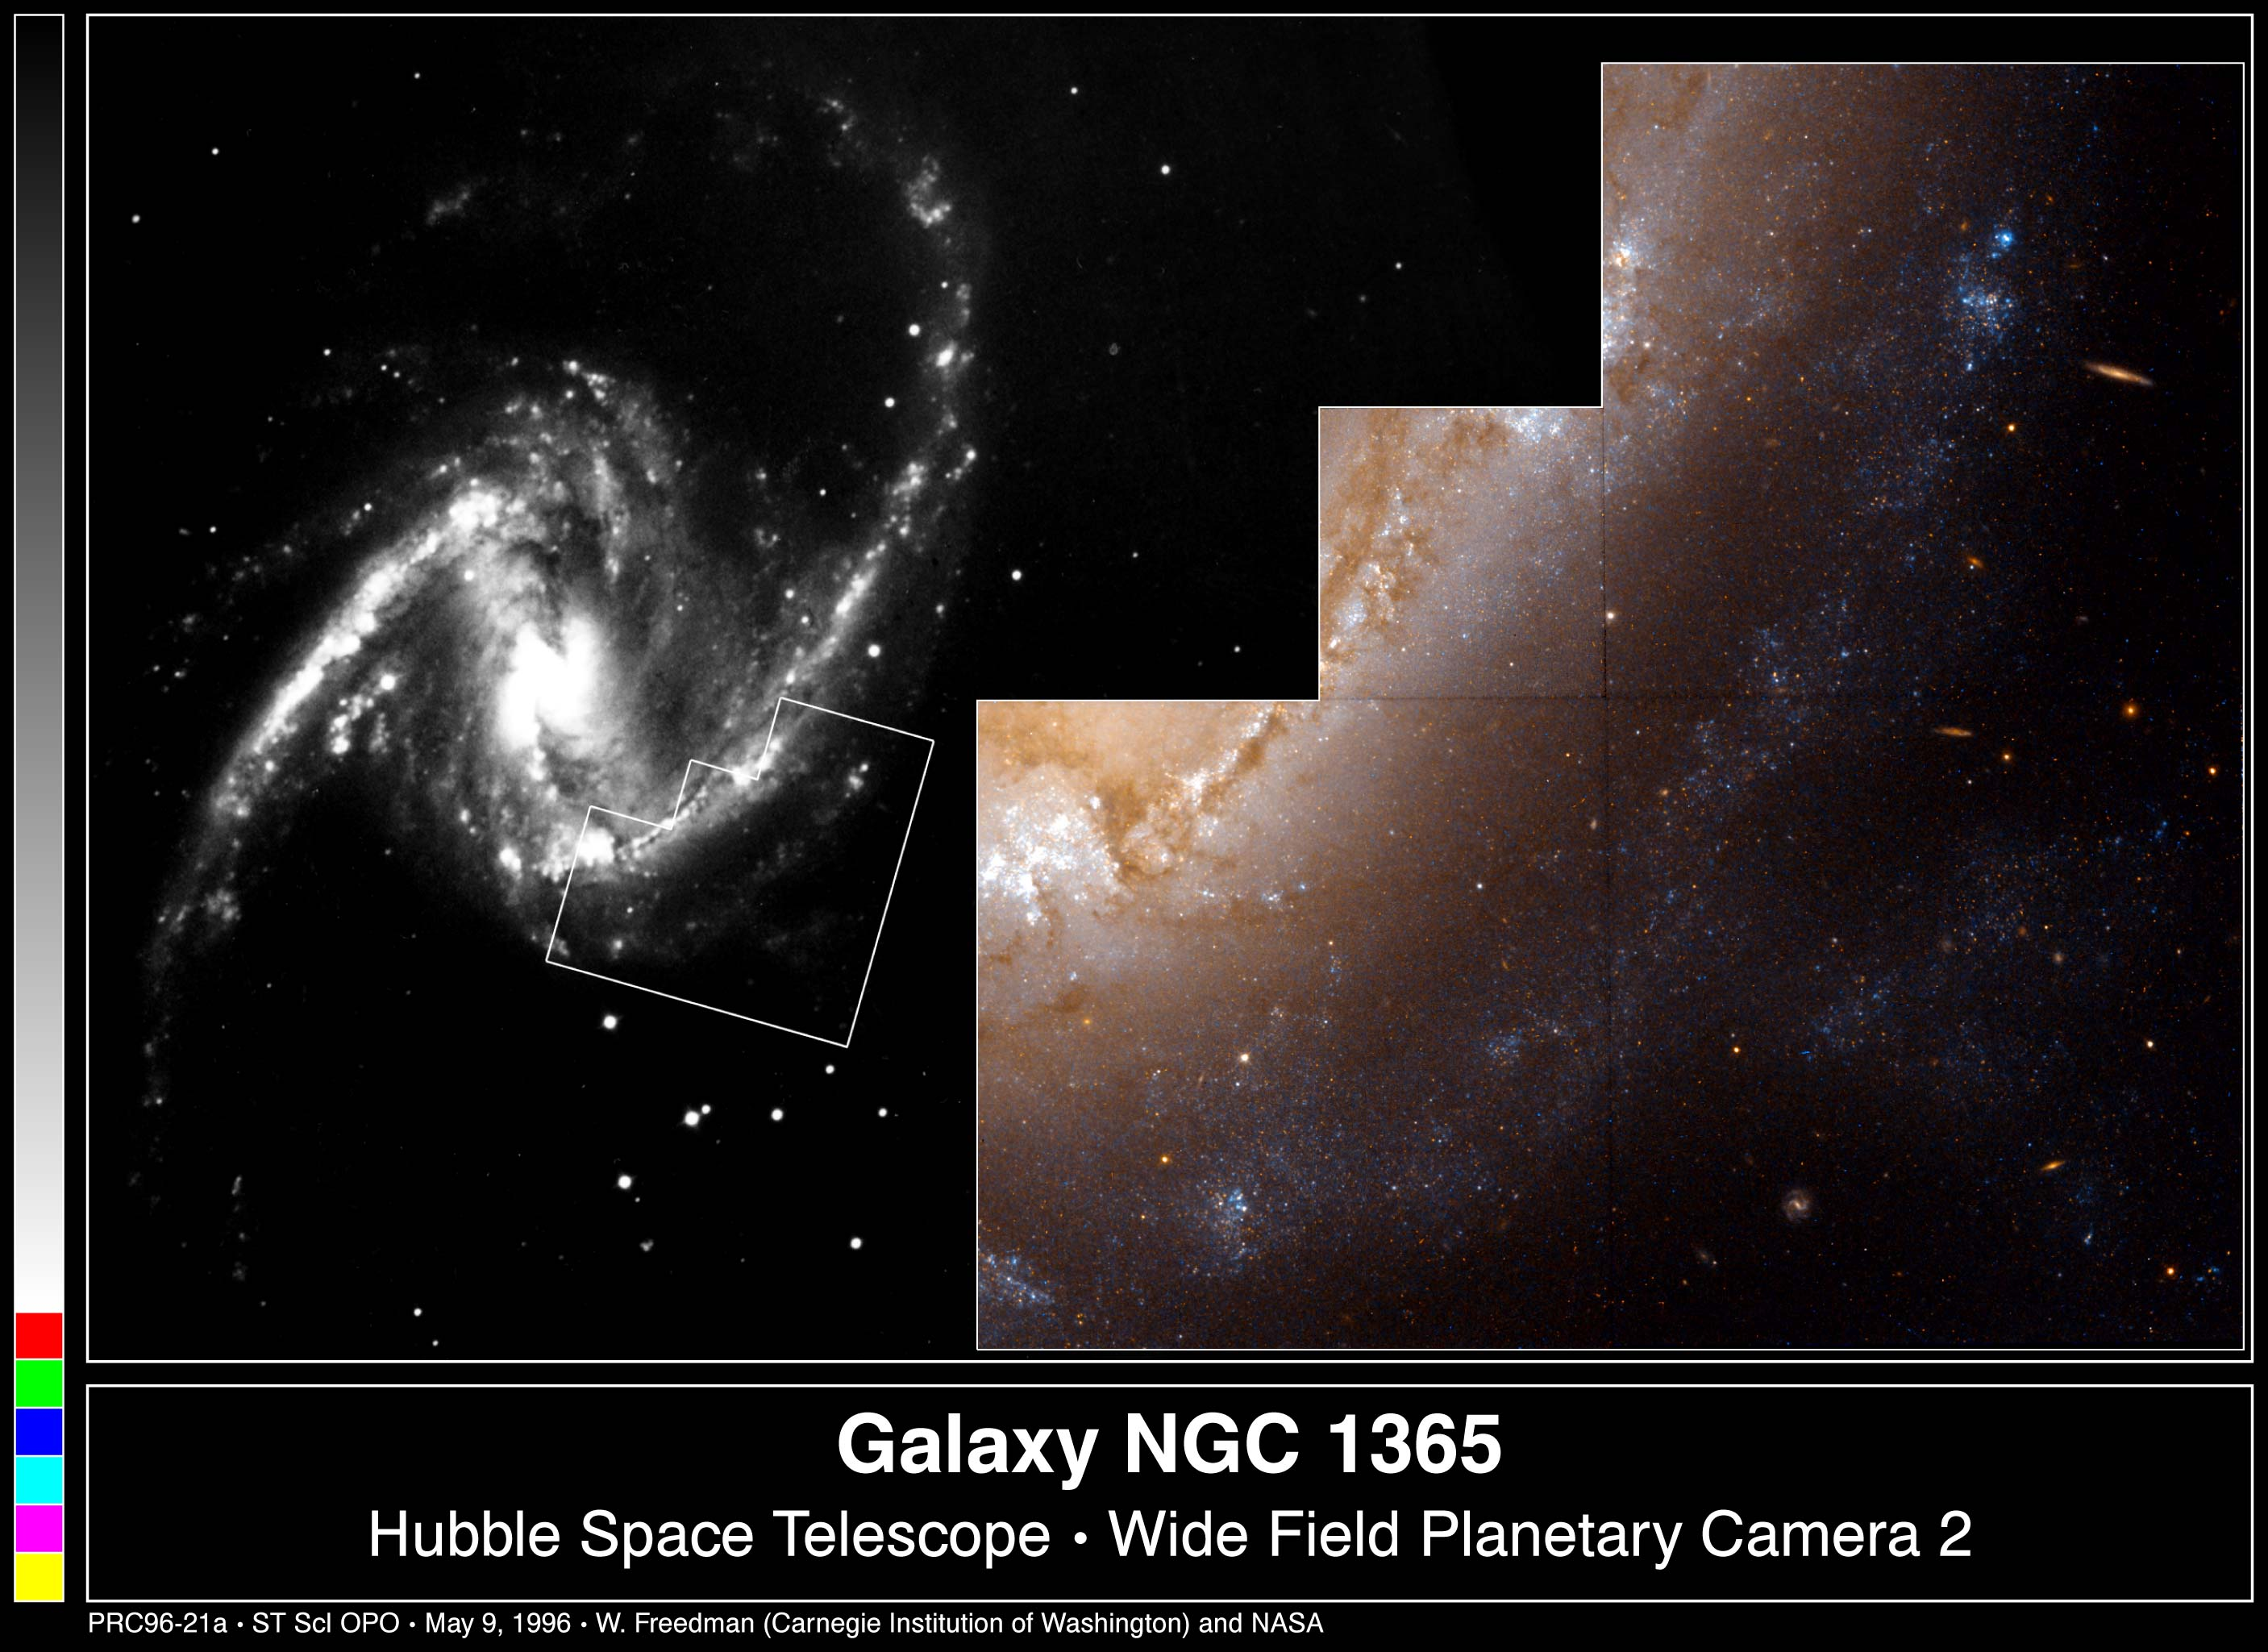

Galaxy NGC 1365

This colour image from the Hubble Space Telescope shows a region in NGC 1365, a barred spiral galaxy located in a cluster of galaxies called Fornax.

A barred spiral galaxy is characterized by a 'bar' of stars, dust and gas across its center.

The black and white photograph from a ground-based telescope shows the entire galaxy, which is visible from the Southern Hemisphere.

Credit: W. Freedman (Carnegie Observatories), the Hubble Space Telescope Key Project team, and NASA/ESA